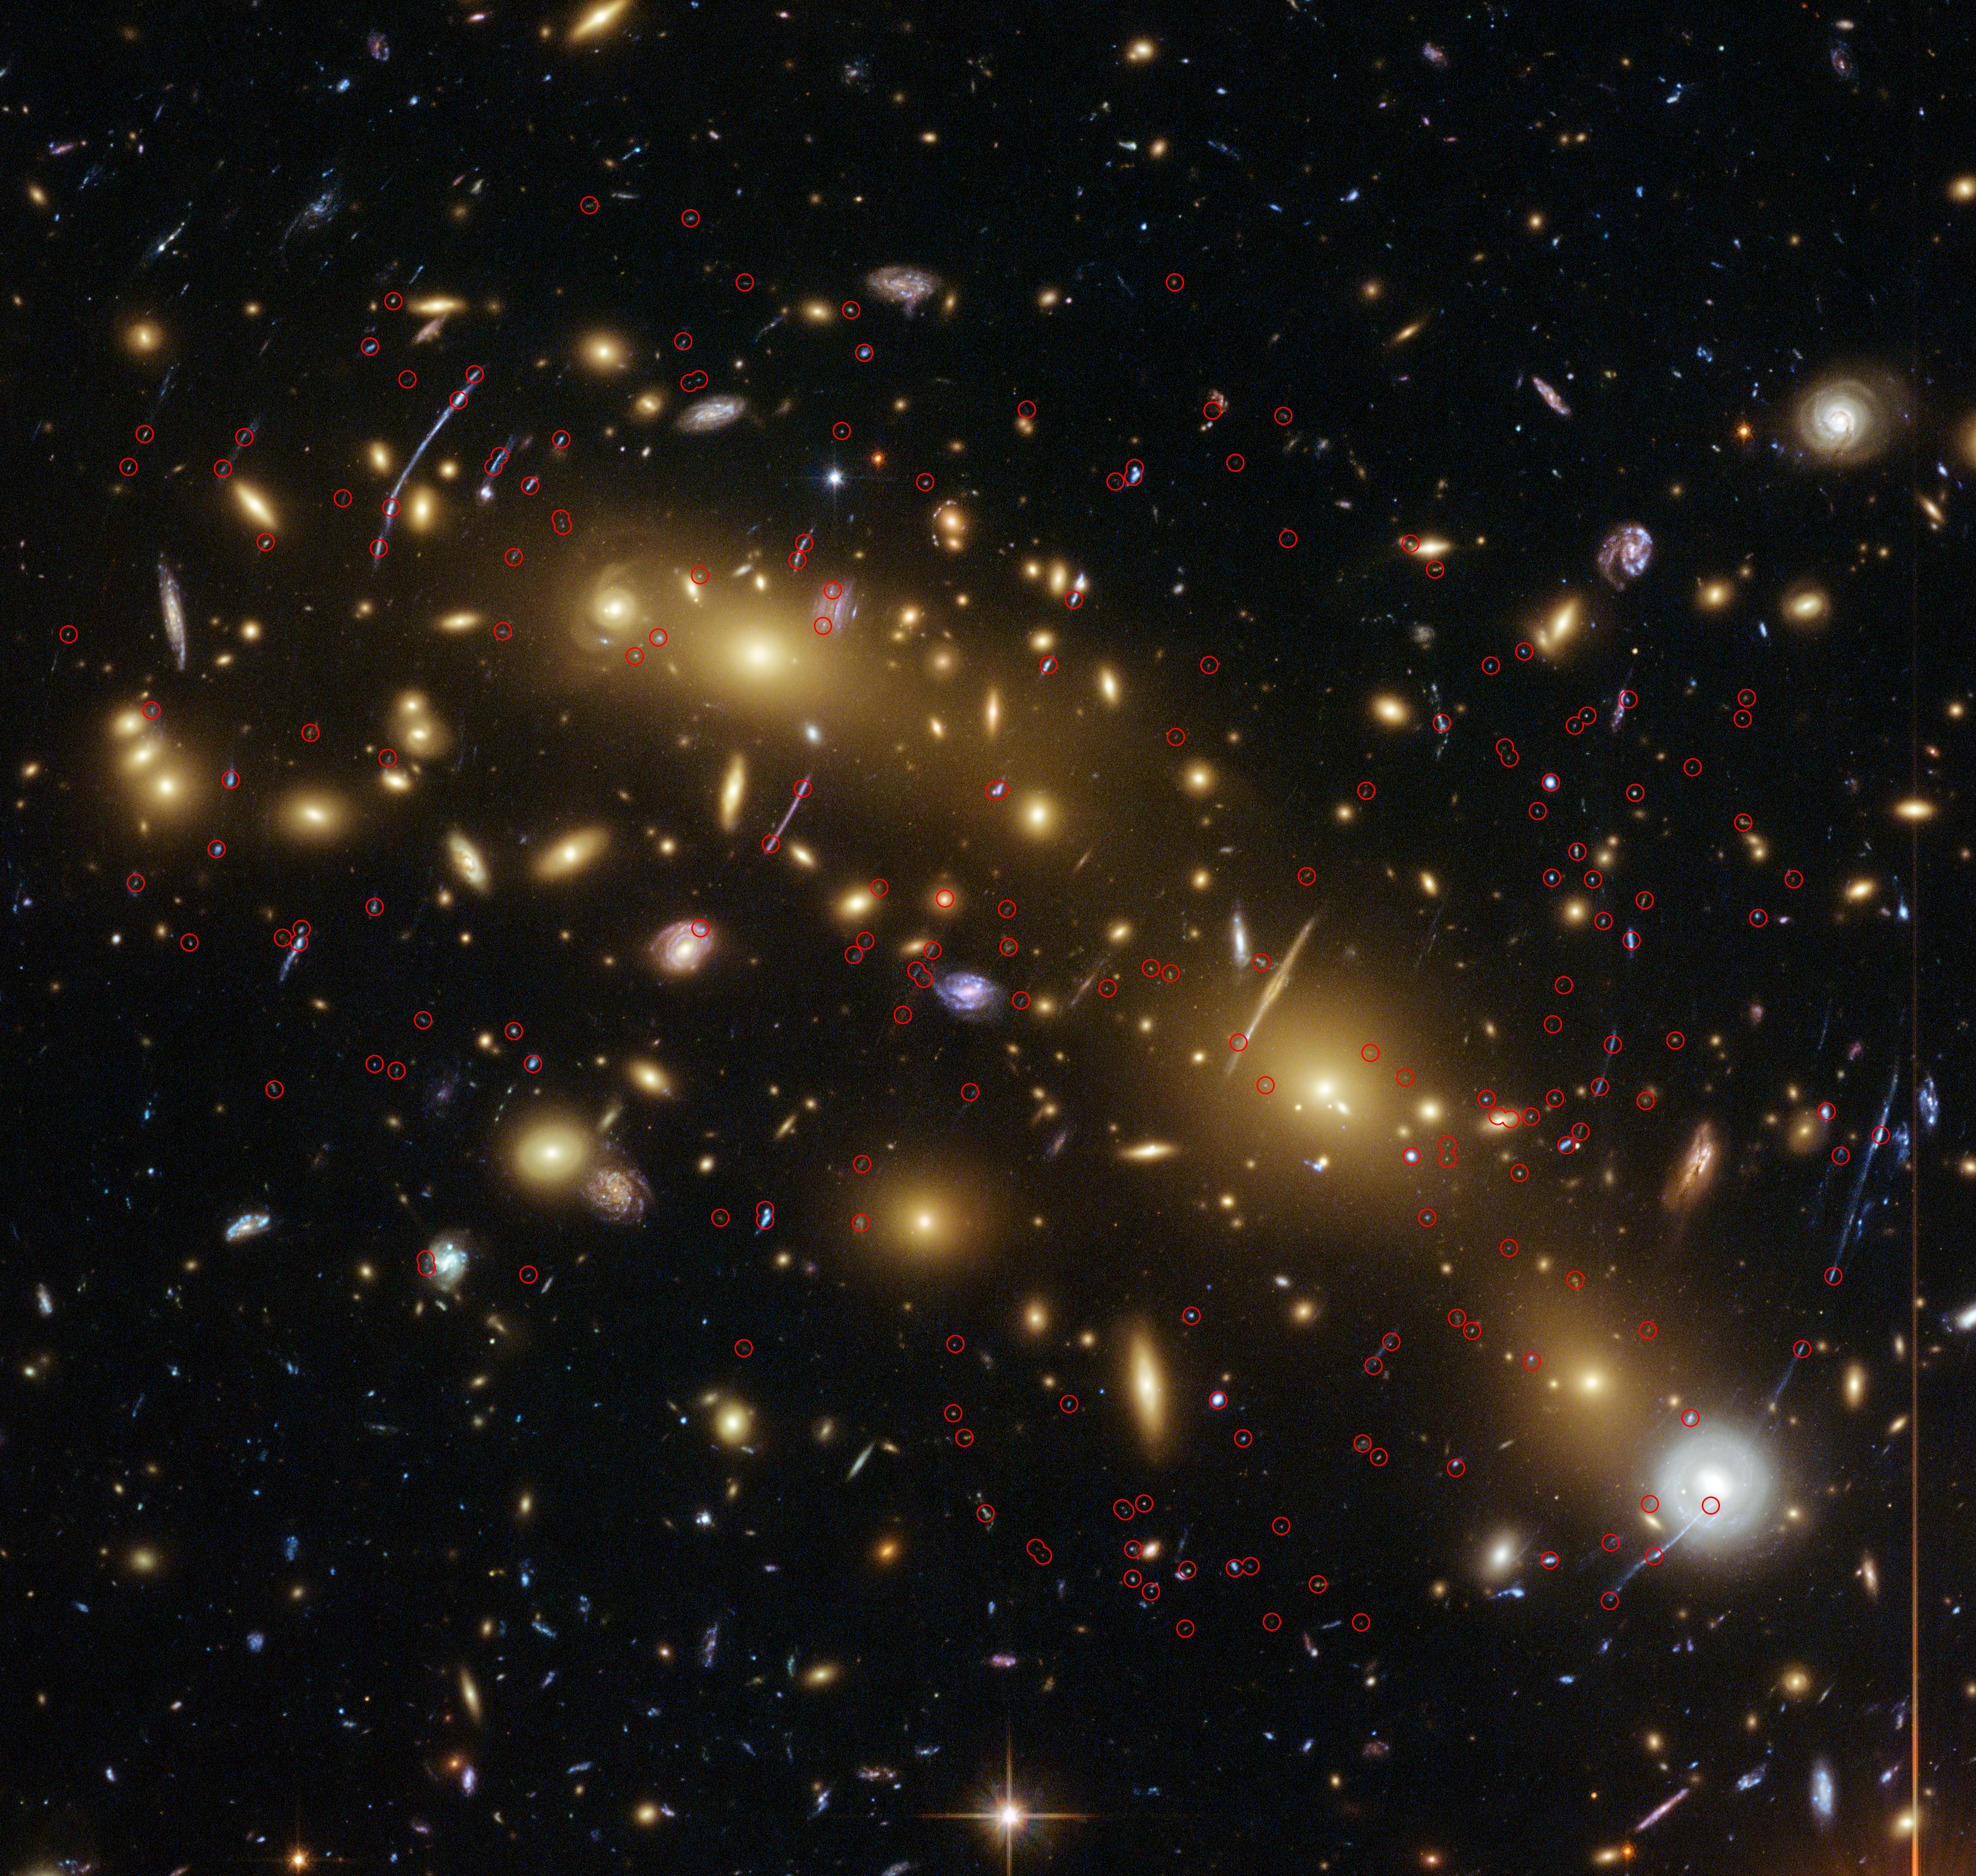

Colour image of galaxy cluster MCS J0416.1–2403, annotated

This image from the NASA/ESA Hubble Space Telescope shows the galaxy cluster MCS J0416.1–2403. This is one of six being studied by the Hubble Frontier Fields programme, a programme to analyse the mass distribution in these huge clusters and to use them, combined with a process known as gravitational lensing, to peer even deeper into the distant Universe.

A team of researchers used almost 200 images of distant galaxies, whose light has been bent and magnified by this huge cluster, combined with new Hubble data to measure the total mass of this cluster more precisely than ever before.

In this image the lensed images used for this study are circled in red.

Credit: ESA/Hubble, NASA, HST Frontier Fields Acknowledgement: Mathilde Jauzac (Durham University, UK and Astrophysics & Cosmology Research Unit, South Africa) and Jean-Paul Kneib (École Polytechnique Fédérale de Lausanne, Switzerland)